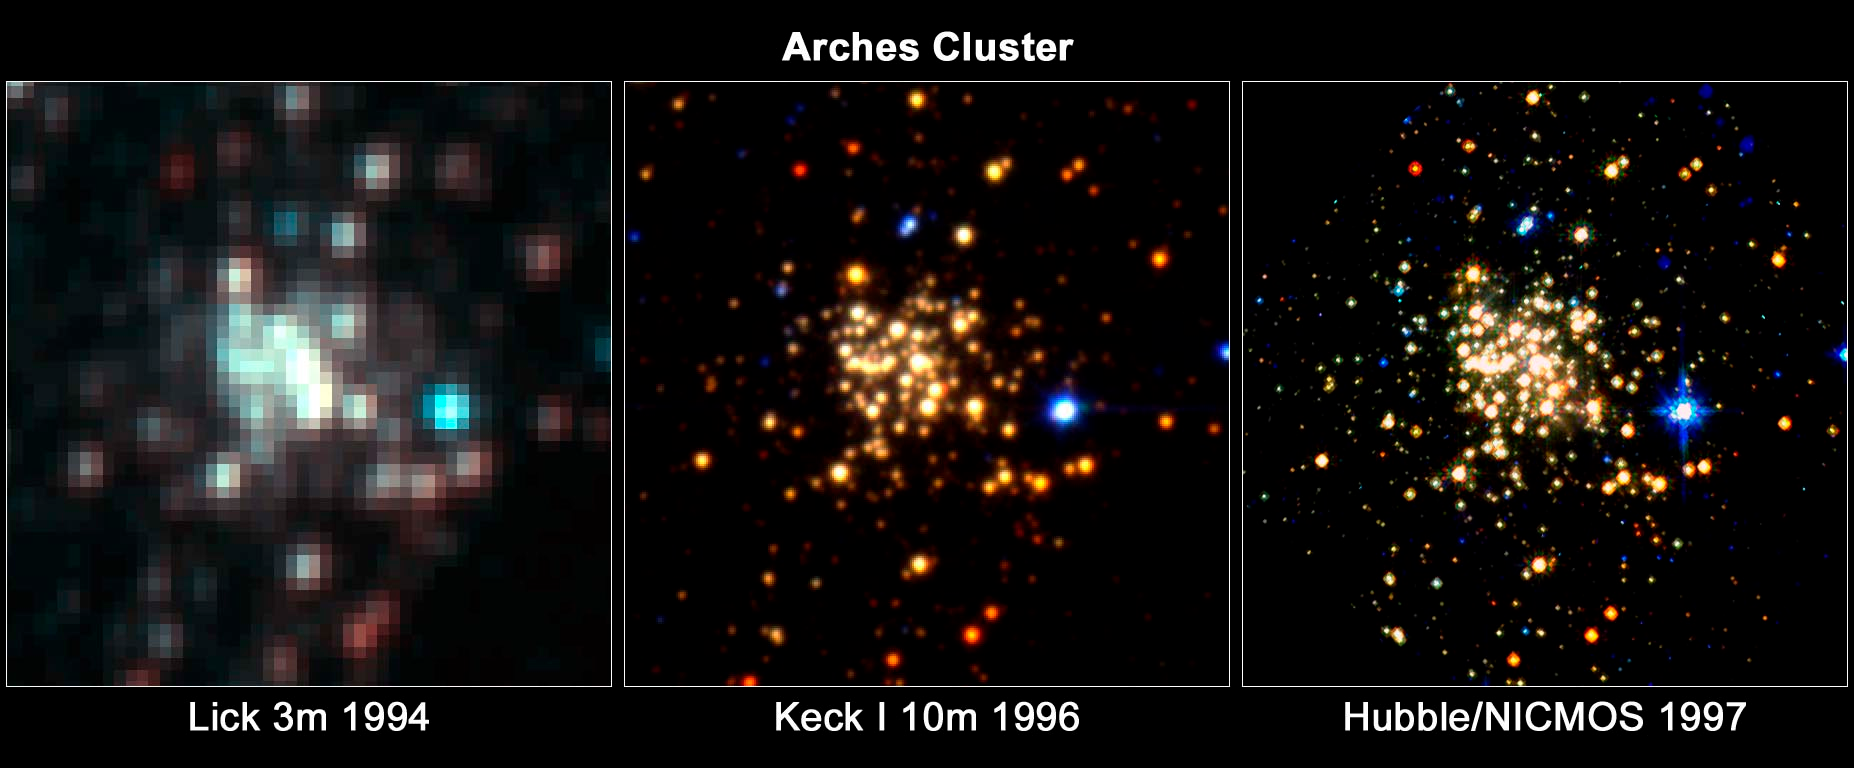

Trio of Images of the Arches Cluster

These images of the Arches cluster, taken by three different telescopes, reveal progressively more detail in the tightly packed collection of about 2,000 stars. The Arches is the densest star cluster in our Milky Way Galaxy and resides in our galaxy's crowded core.

Credit: NASA, ESA, D. Figer (STScI); [Middle] - G. Serabyn (JPL), D. Shupe (Caltech) and D. Figer (STScI); [Right] - NASA, ESA and D. Figer (STScI)